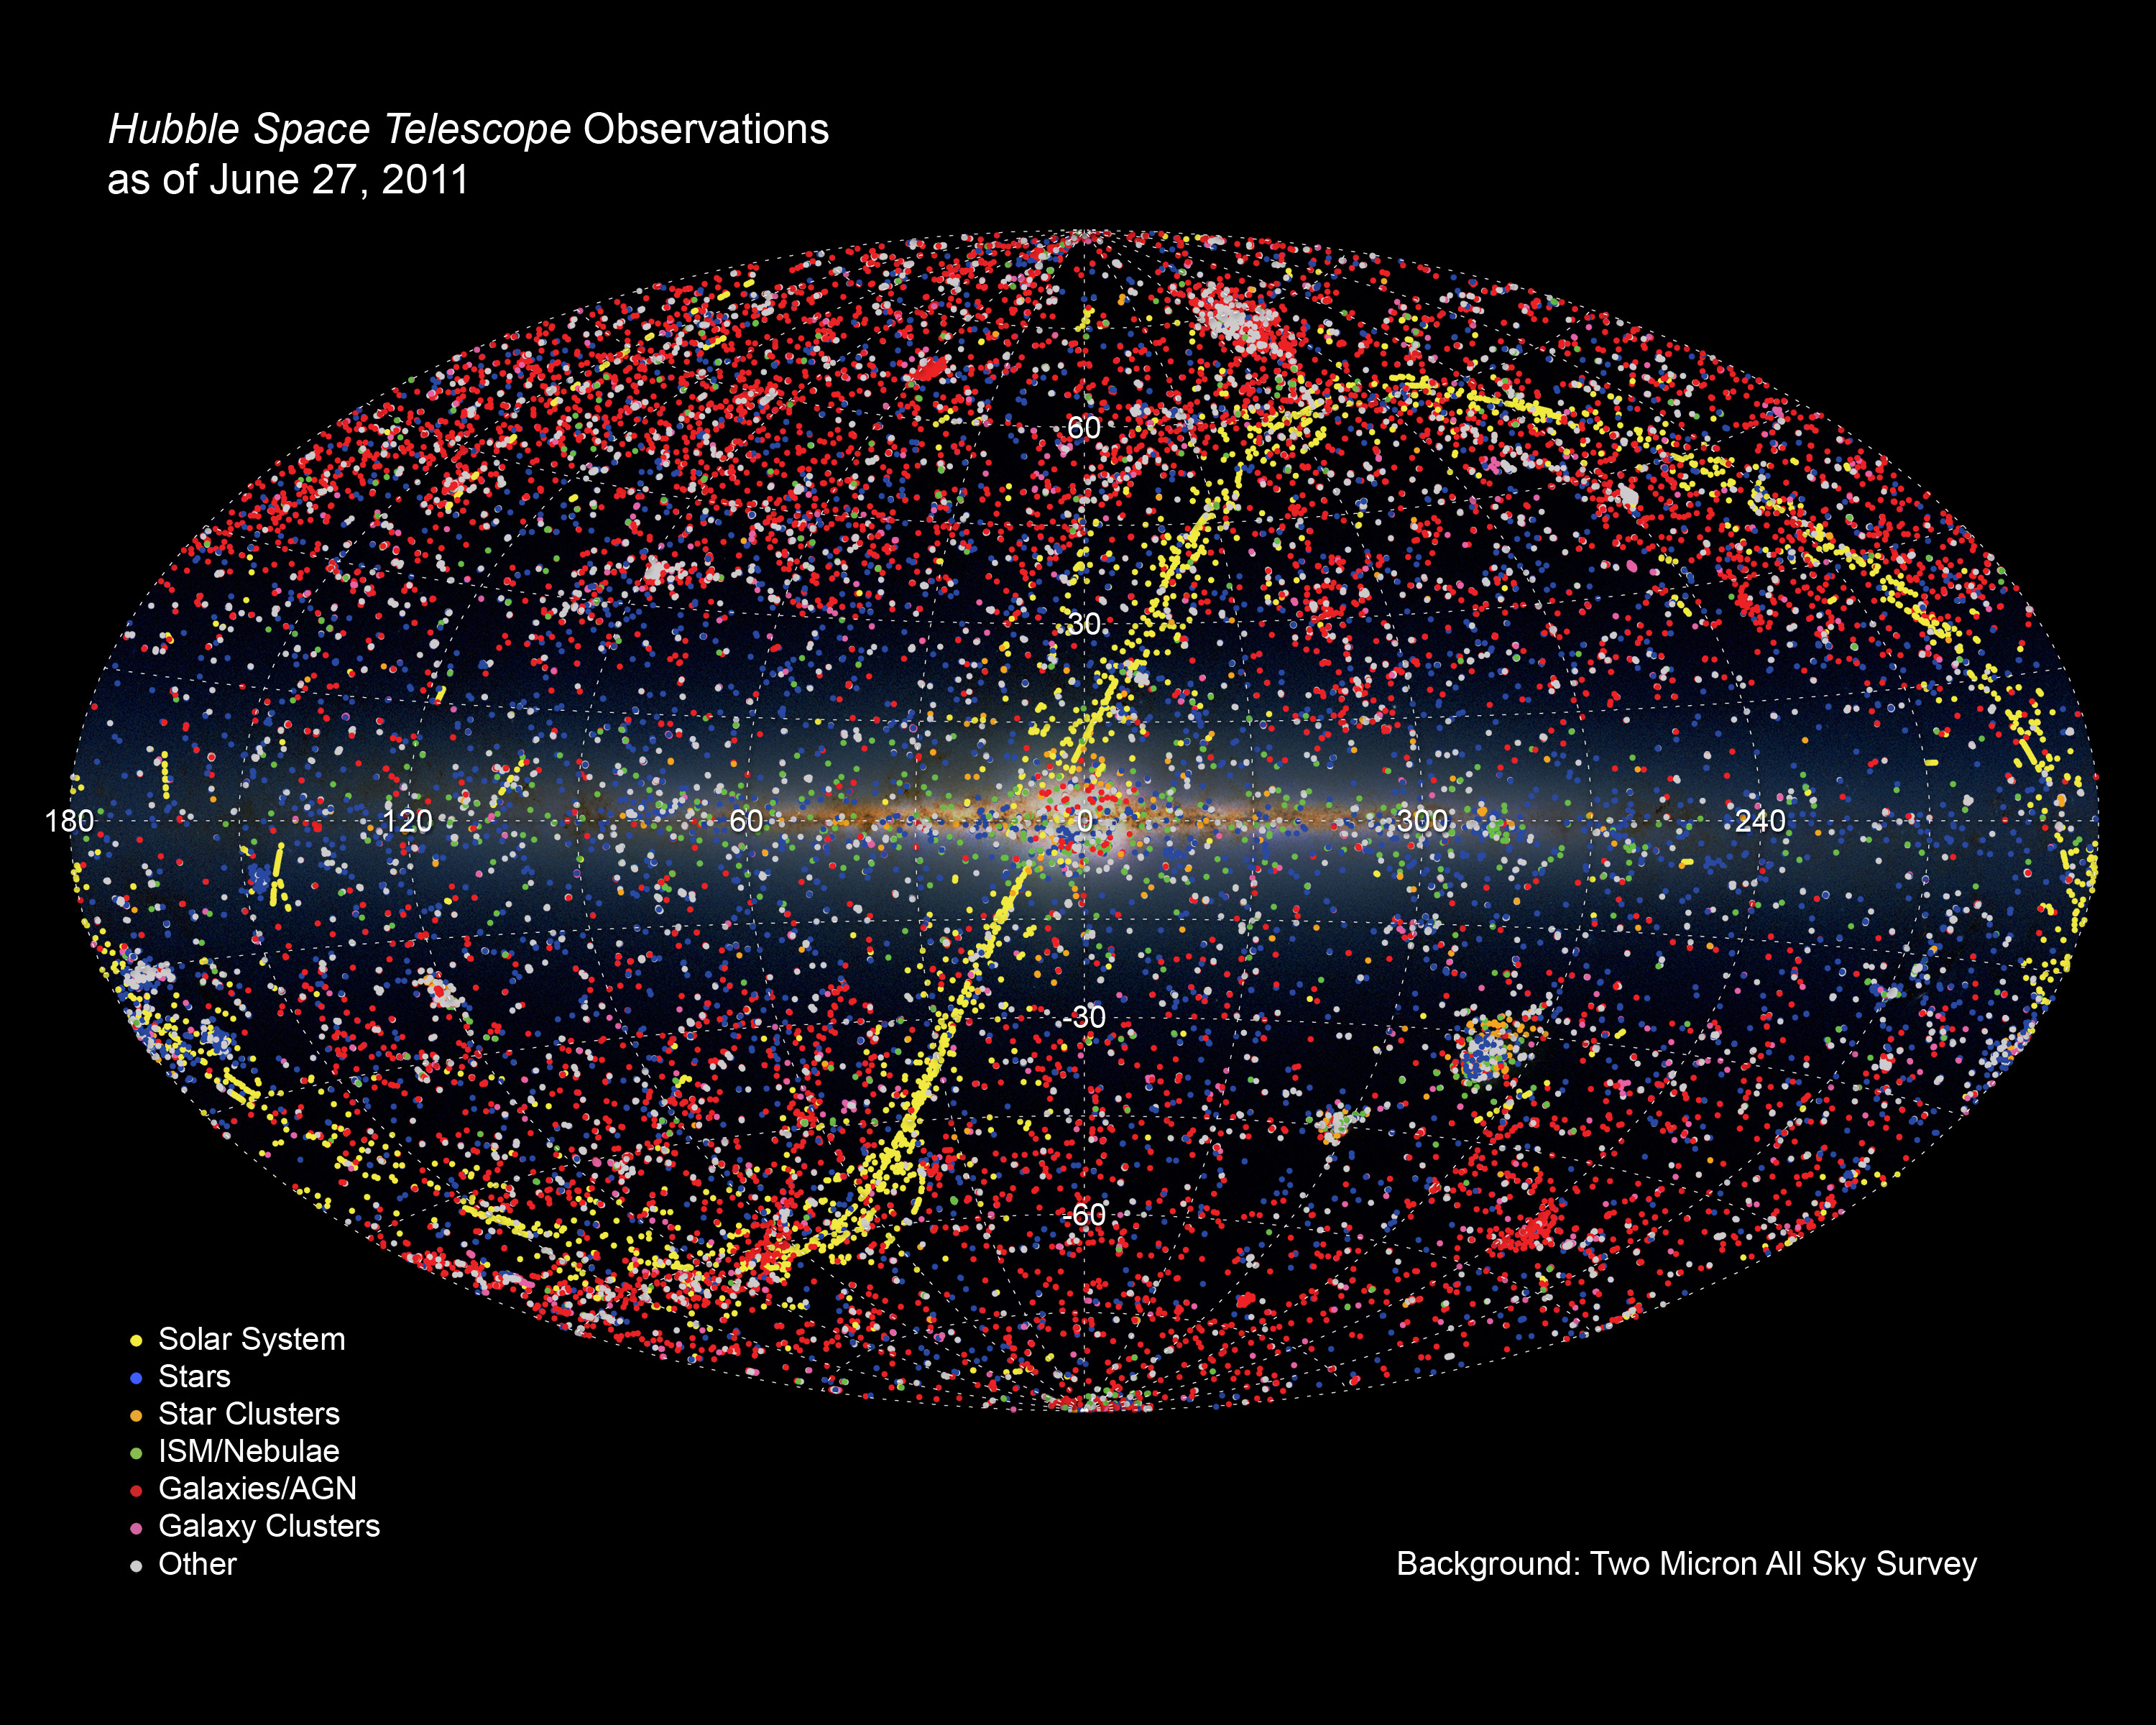

All-sky illustration of all Hubble observations as of 27 June 2011

All-sky illustration of all Hubble observations as of 27 June 2011.

Credit: NASA, ESA, and R. Thompson (CSC/STScI)